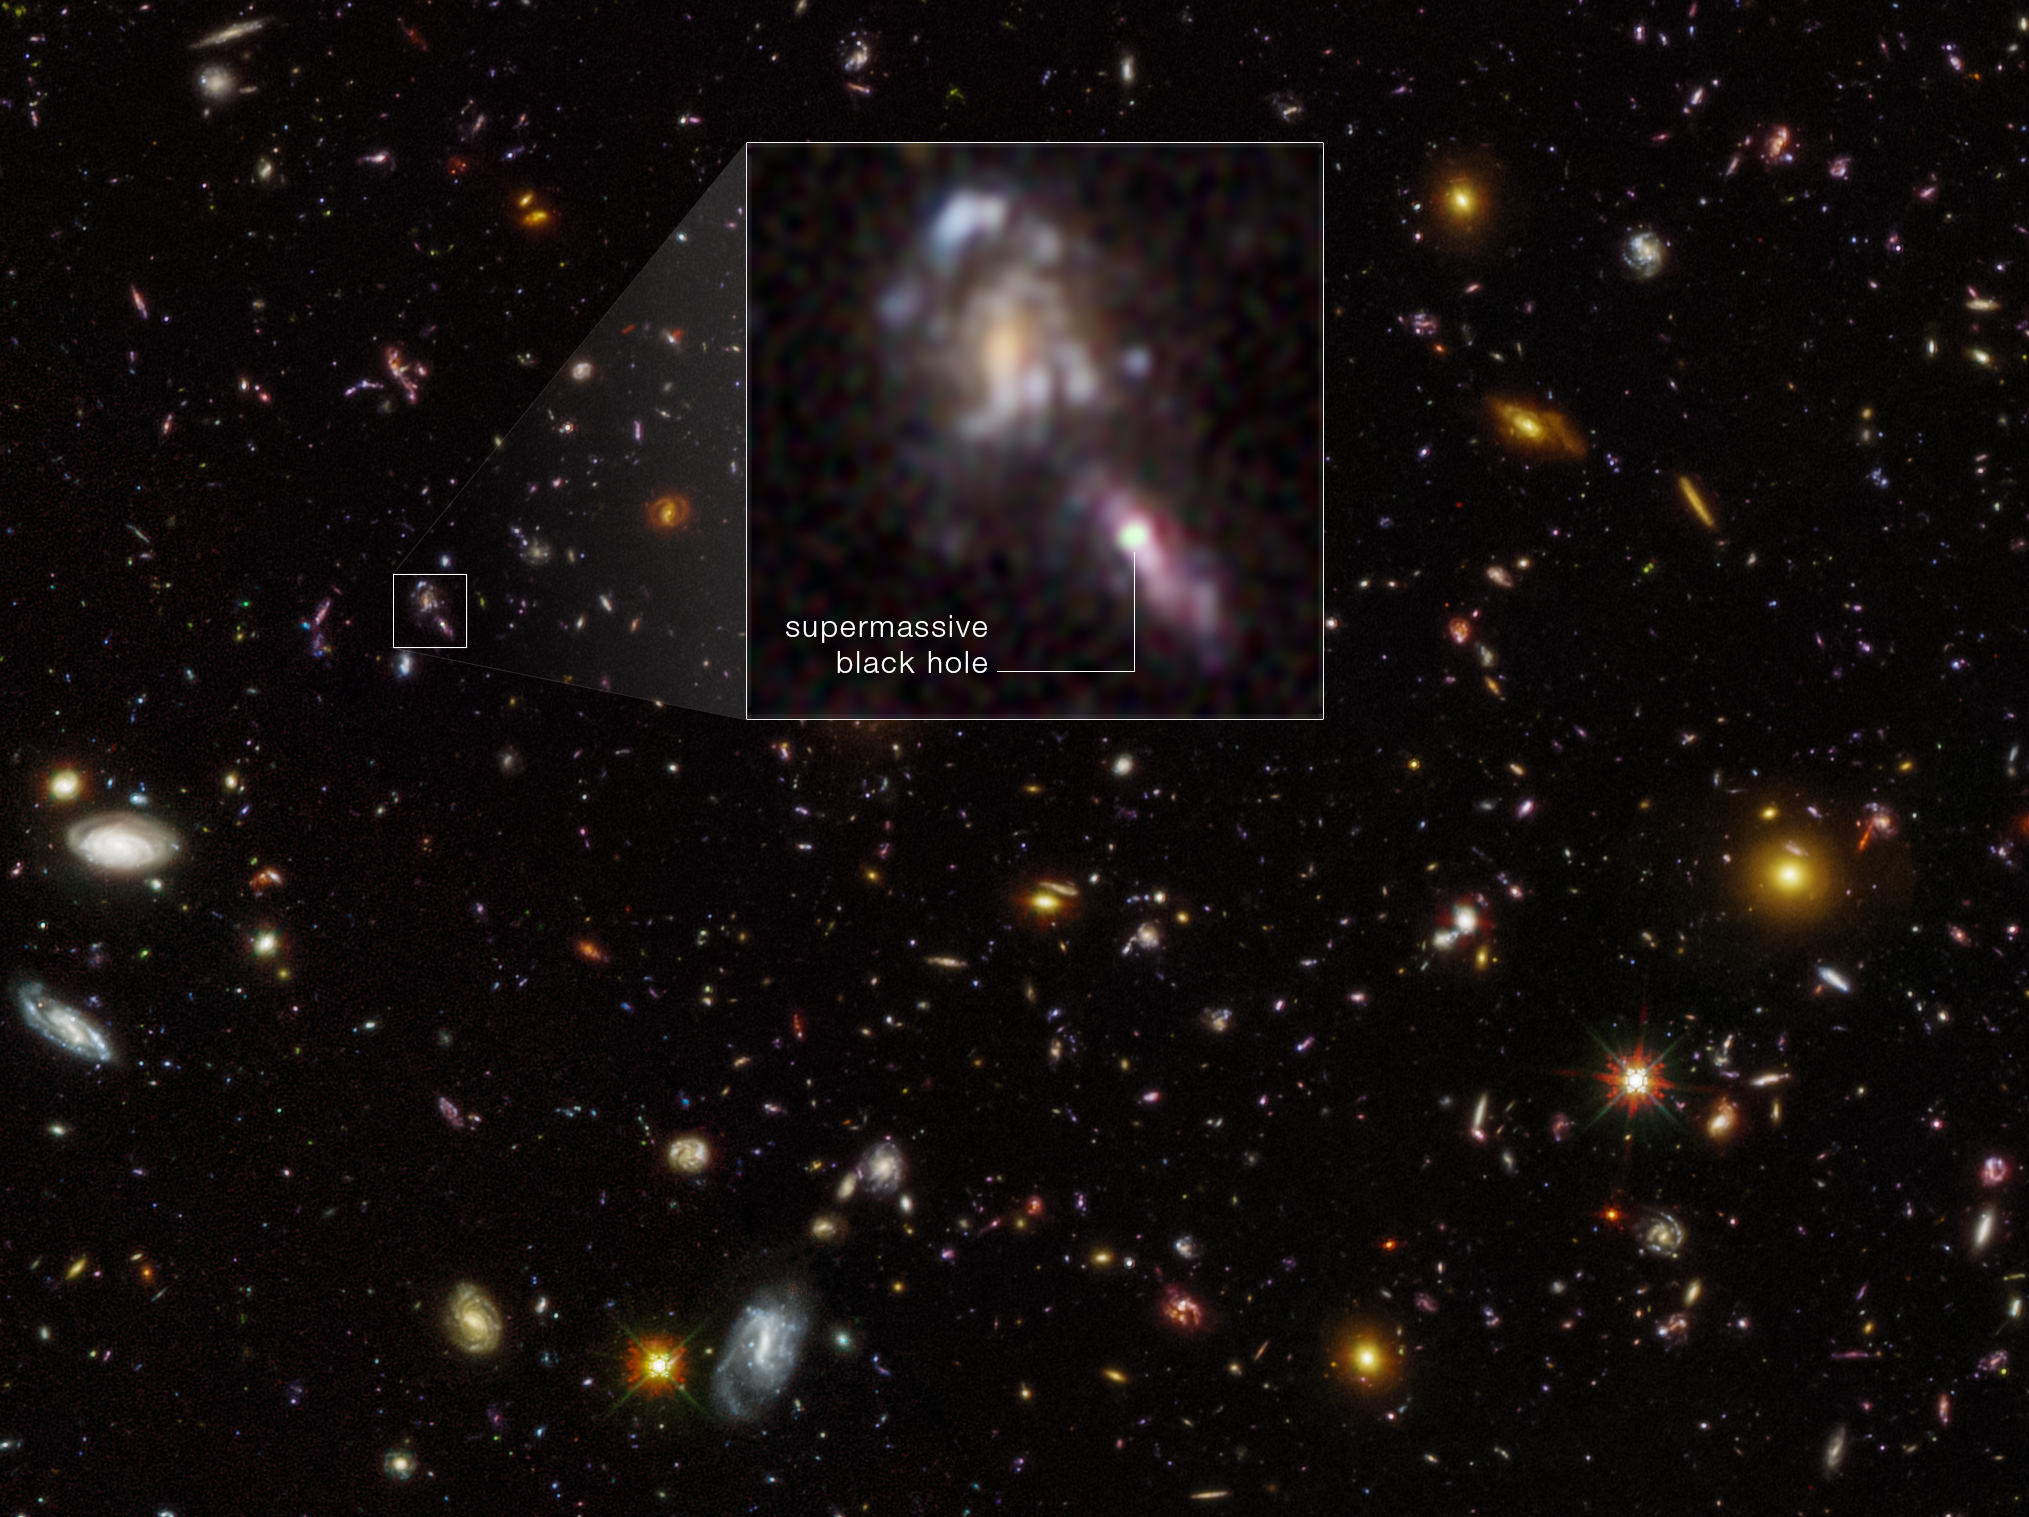

Supermassive Black Holes in Hubble Ultra Deep Field

This is a new image of the Hubble Ultra Deep Field. The first deep imaging of the field was done with Hubble in 2004. The same survey field was observed again by Hubble several years later, and was then reimaged in 2023. By comparing Hubble Wide Field Camera 3 near-infrared exposures taken in 2009, 2012, and 2023, astronomers found evidence for flickering supermassive black holes in the hearts of early galaxies. One example is seen as a bright object in the inset. Some supermassive black holes do not swallow surrounding material constantly, but in fits and bursts, making their brightness flicker. This can be detected by comparing Hubble Ultra Deep Field frames taken at different epochs. The survey found more black holes than predicted.

The image was created from Hubble data from the following proposals: 9978, 10086 (S. Beckwith); 11563 (G. Illingworth); 12498 (R. Ellis); and 17073 (M. Hayes). These images are composites of separate exposures acquired by the ACS and WFC3 instruments on the Hubble Space Telescope.

Credit: NASA, ESA, M. Hayes (Stockholm University), J. DePasquale (STScI)